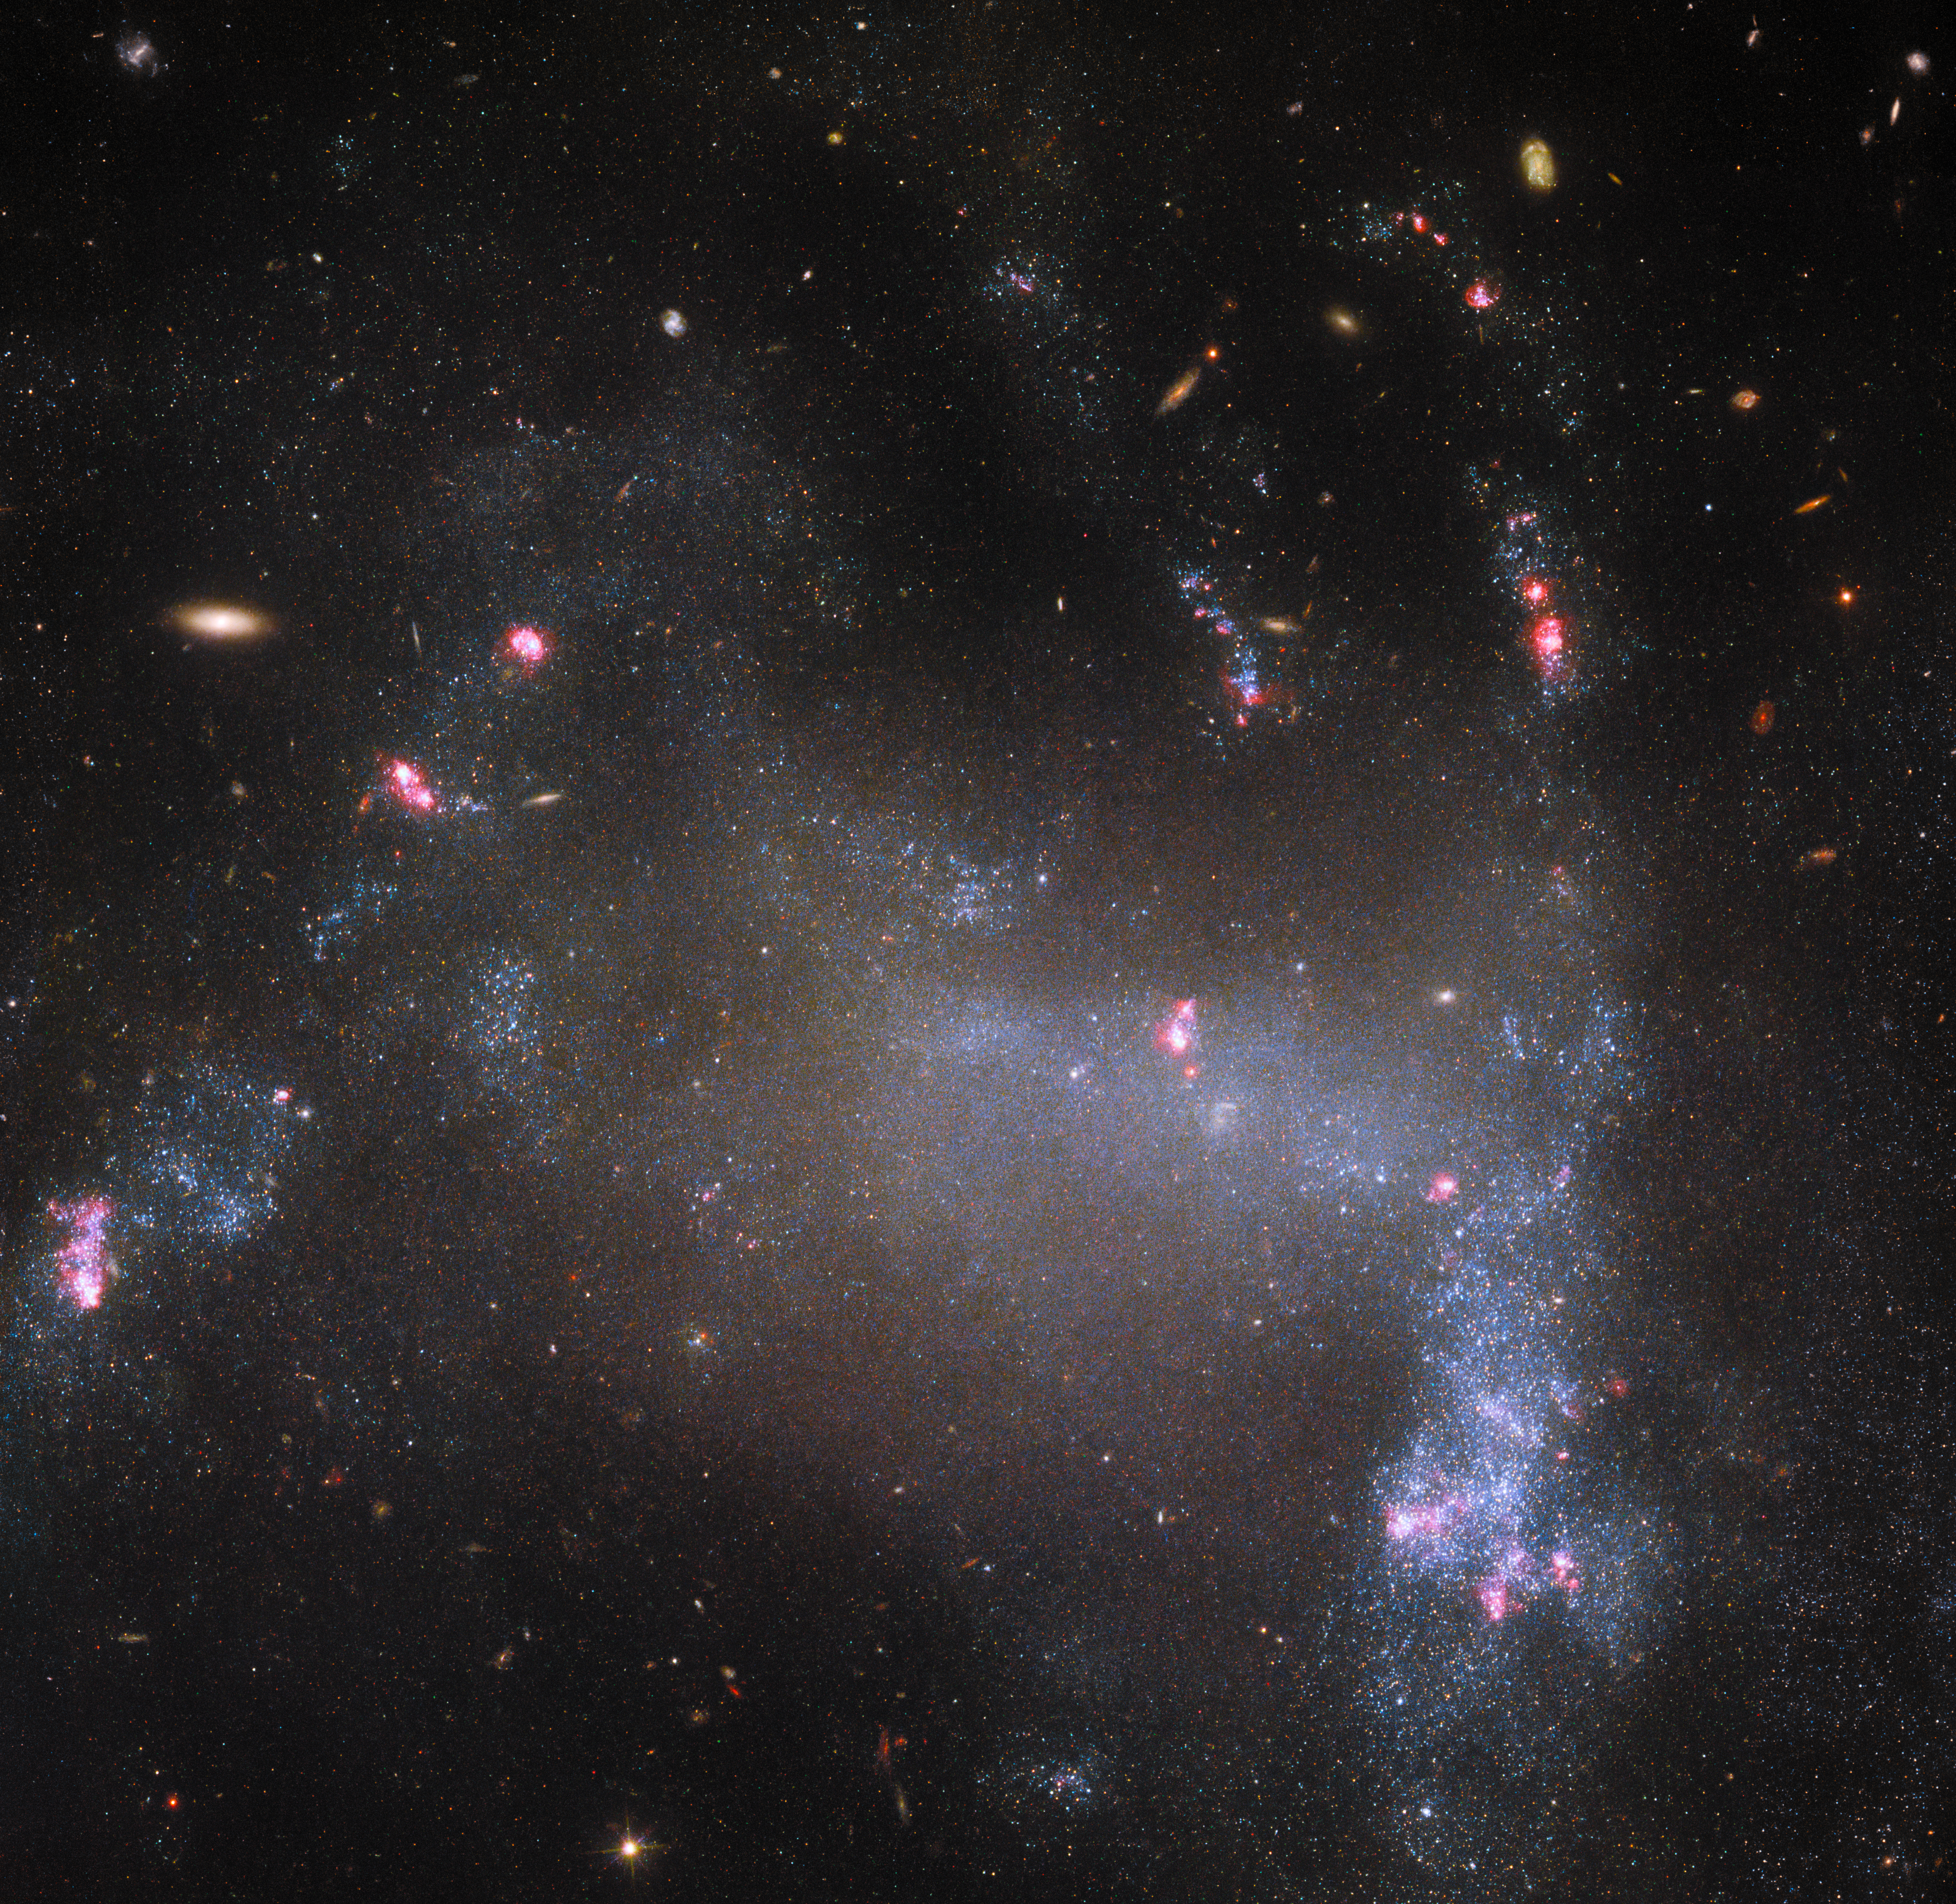

The Spider (and not its web)

This gauzy-looking celestial body is UGC 5829, an irregular galaxy that lies about 30 million light-years away. Despite there not being many observations of this relatively faint galaxy, it has the distinction of having a descriptive soubriquet: the Spider Galaxy. Perhaps the distorted galactic arms with their glowing, star-forming tips bring to mind the clawed legs of an arachnid. Somewhat confusingly, there is another, very similarly nicknamed but otherwise entirely distinct, galaxy known as the Spiderweb Galaxy. This galaxy has also been more extensively imaged (notably by Hubble), despite the fact that it lies about 300 times further from Earth than the Spider Galaxy does.

Fortunately, correct galaxy identification does not depend on casual given names. Rather, known galaxies are recorded in at least one catalogue — and often in several — such as the Uppsala General Catalogue of Galaxies, which gives the Spider Galaxy its more formal title of UGC 5829. This same galaxy also has several different designations in various other catalogues: it is, for example, LEDA 31923 in the Lyon-Meudon Extragalactic Database; MCG+06-24-006 in the Morphological Catalogue of Galaxies; and SDSS J104242.78+342657.3 in the Sloan Digital Sky Survey Catalogue. The Spiderweb Galaxy isn’t recorded in all of the same catalogues — each is necessarily limited in scope — but it is included in the LEDA catalogue as LEDA 2826829. It is evidently simpler to not conflate the dull but distinct names LEDA 31923 and LEDA 2826829, than the fun but easily confused Spider and Spiderweb!

Credit: ESA/Hubble & NASA, R. Tully, M. Messa